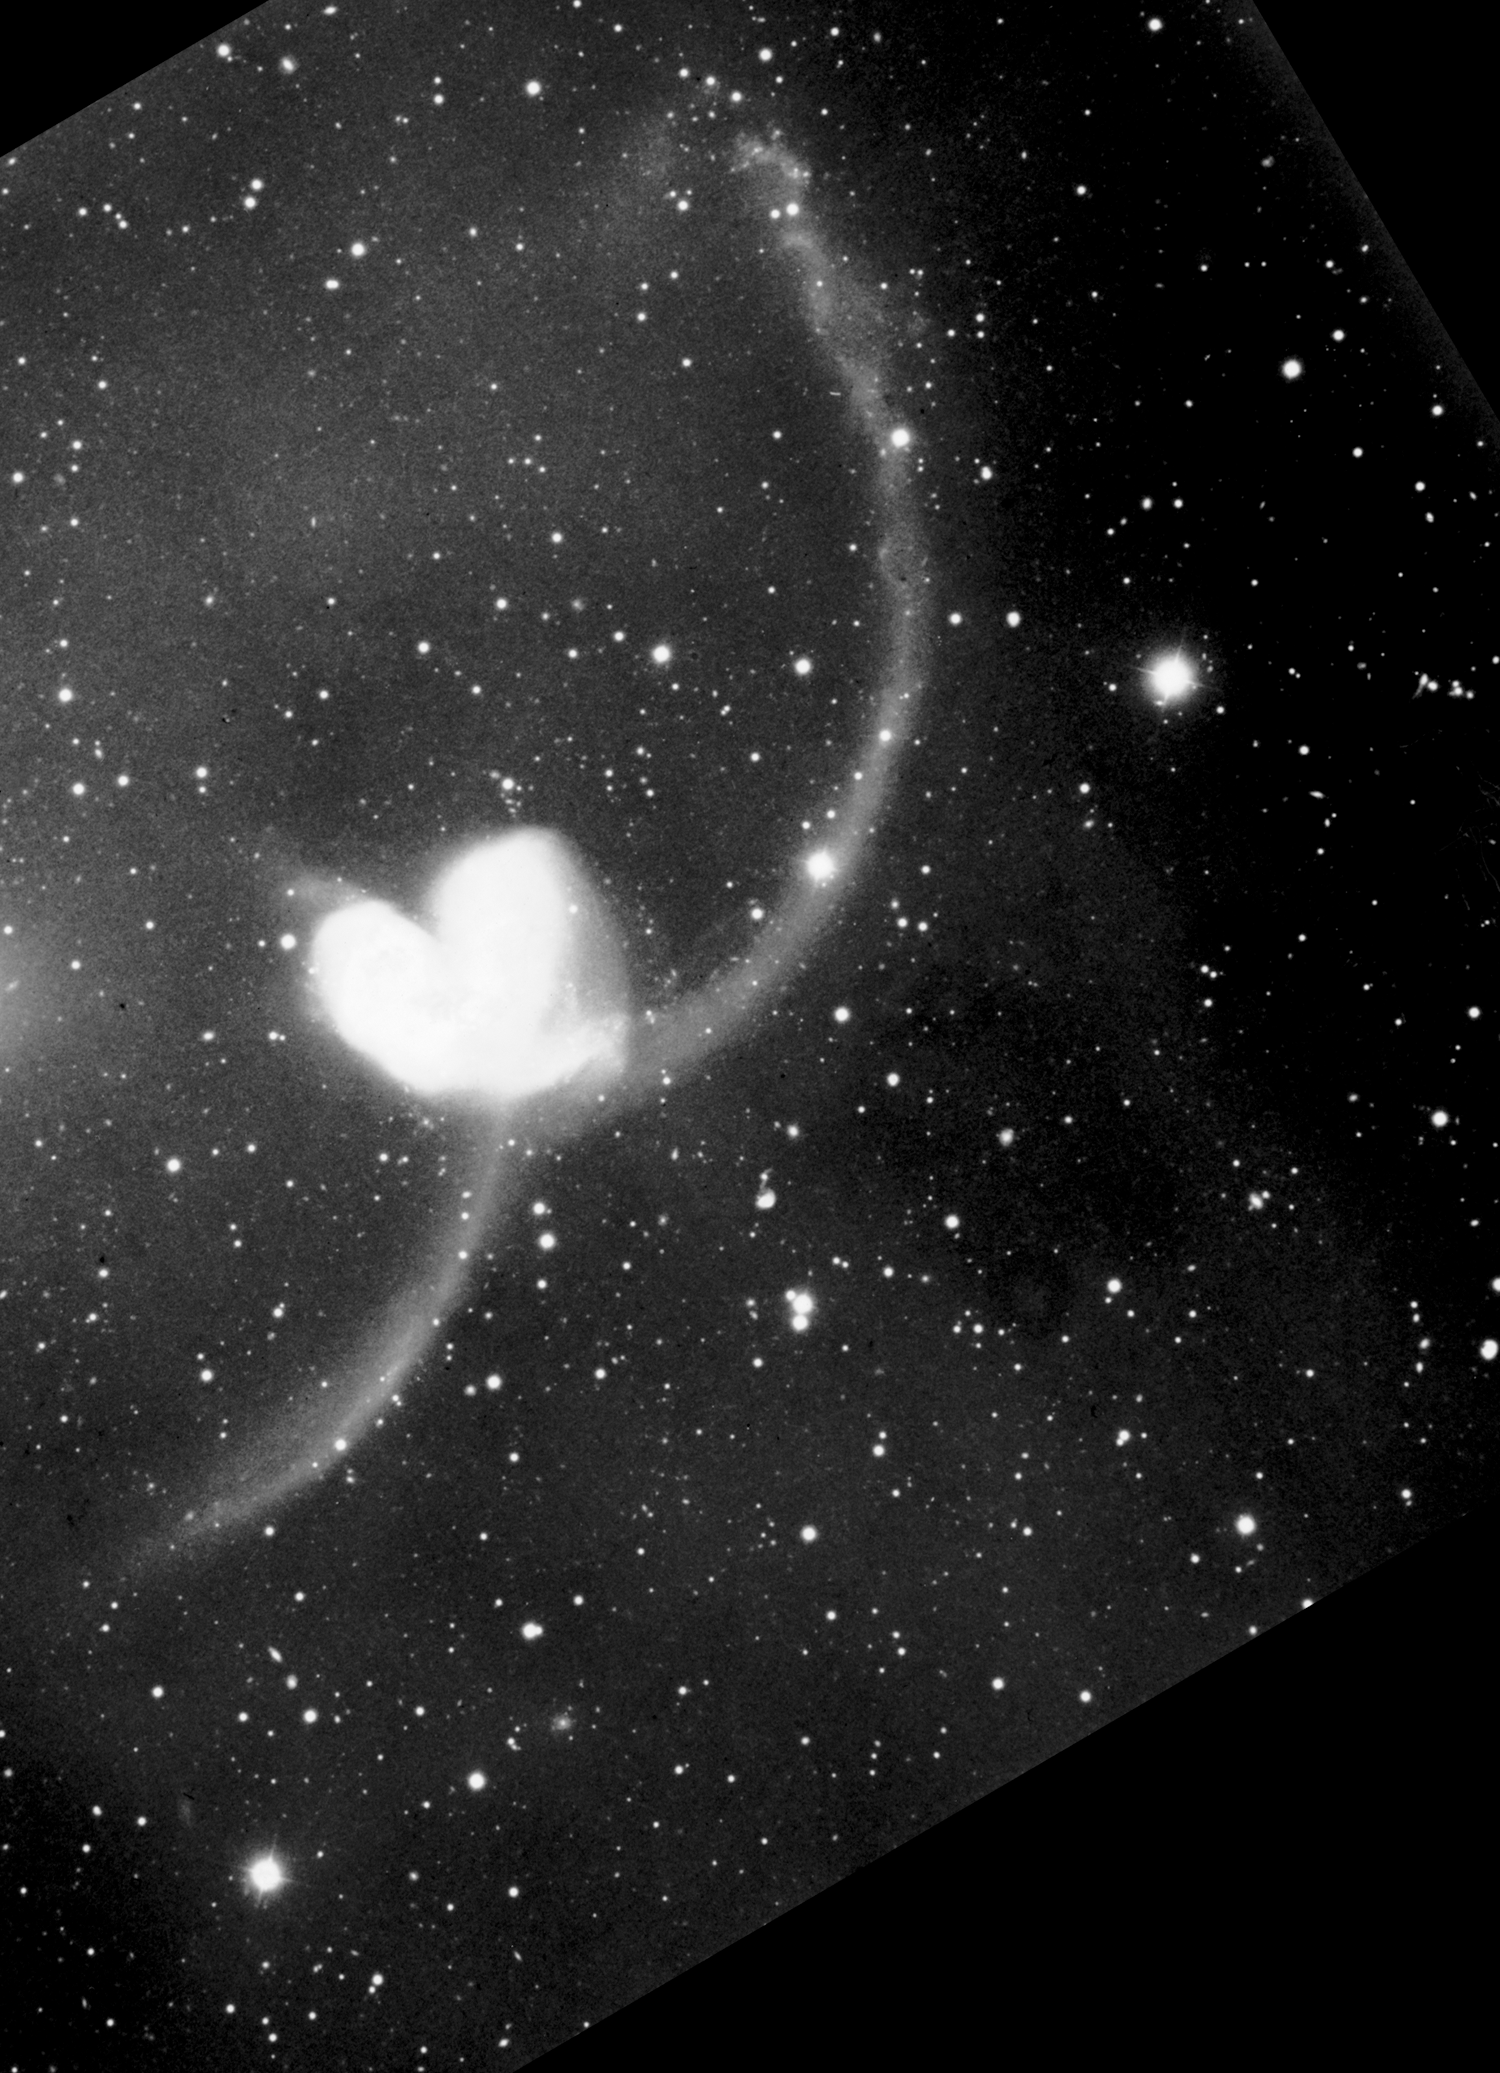

Colliding Galaxies NGC 4038 and NGC 4039 (ground-based image)

A ground-based telescopic view of the Antennae galaxies (known formally as NGC 4038/4039) - so named because a pair of long tails of luminous matter, formed by the gravitational tidal forces of their encounter, resembles an insect's antennae. The galaxies are located 63 million light-years away in the southern constellation Corvus.

Credit: Brad Whitmore (STScI), and NASA/ESA